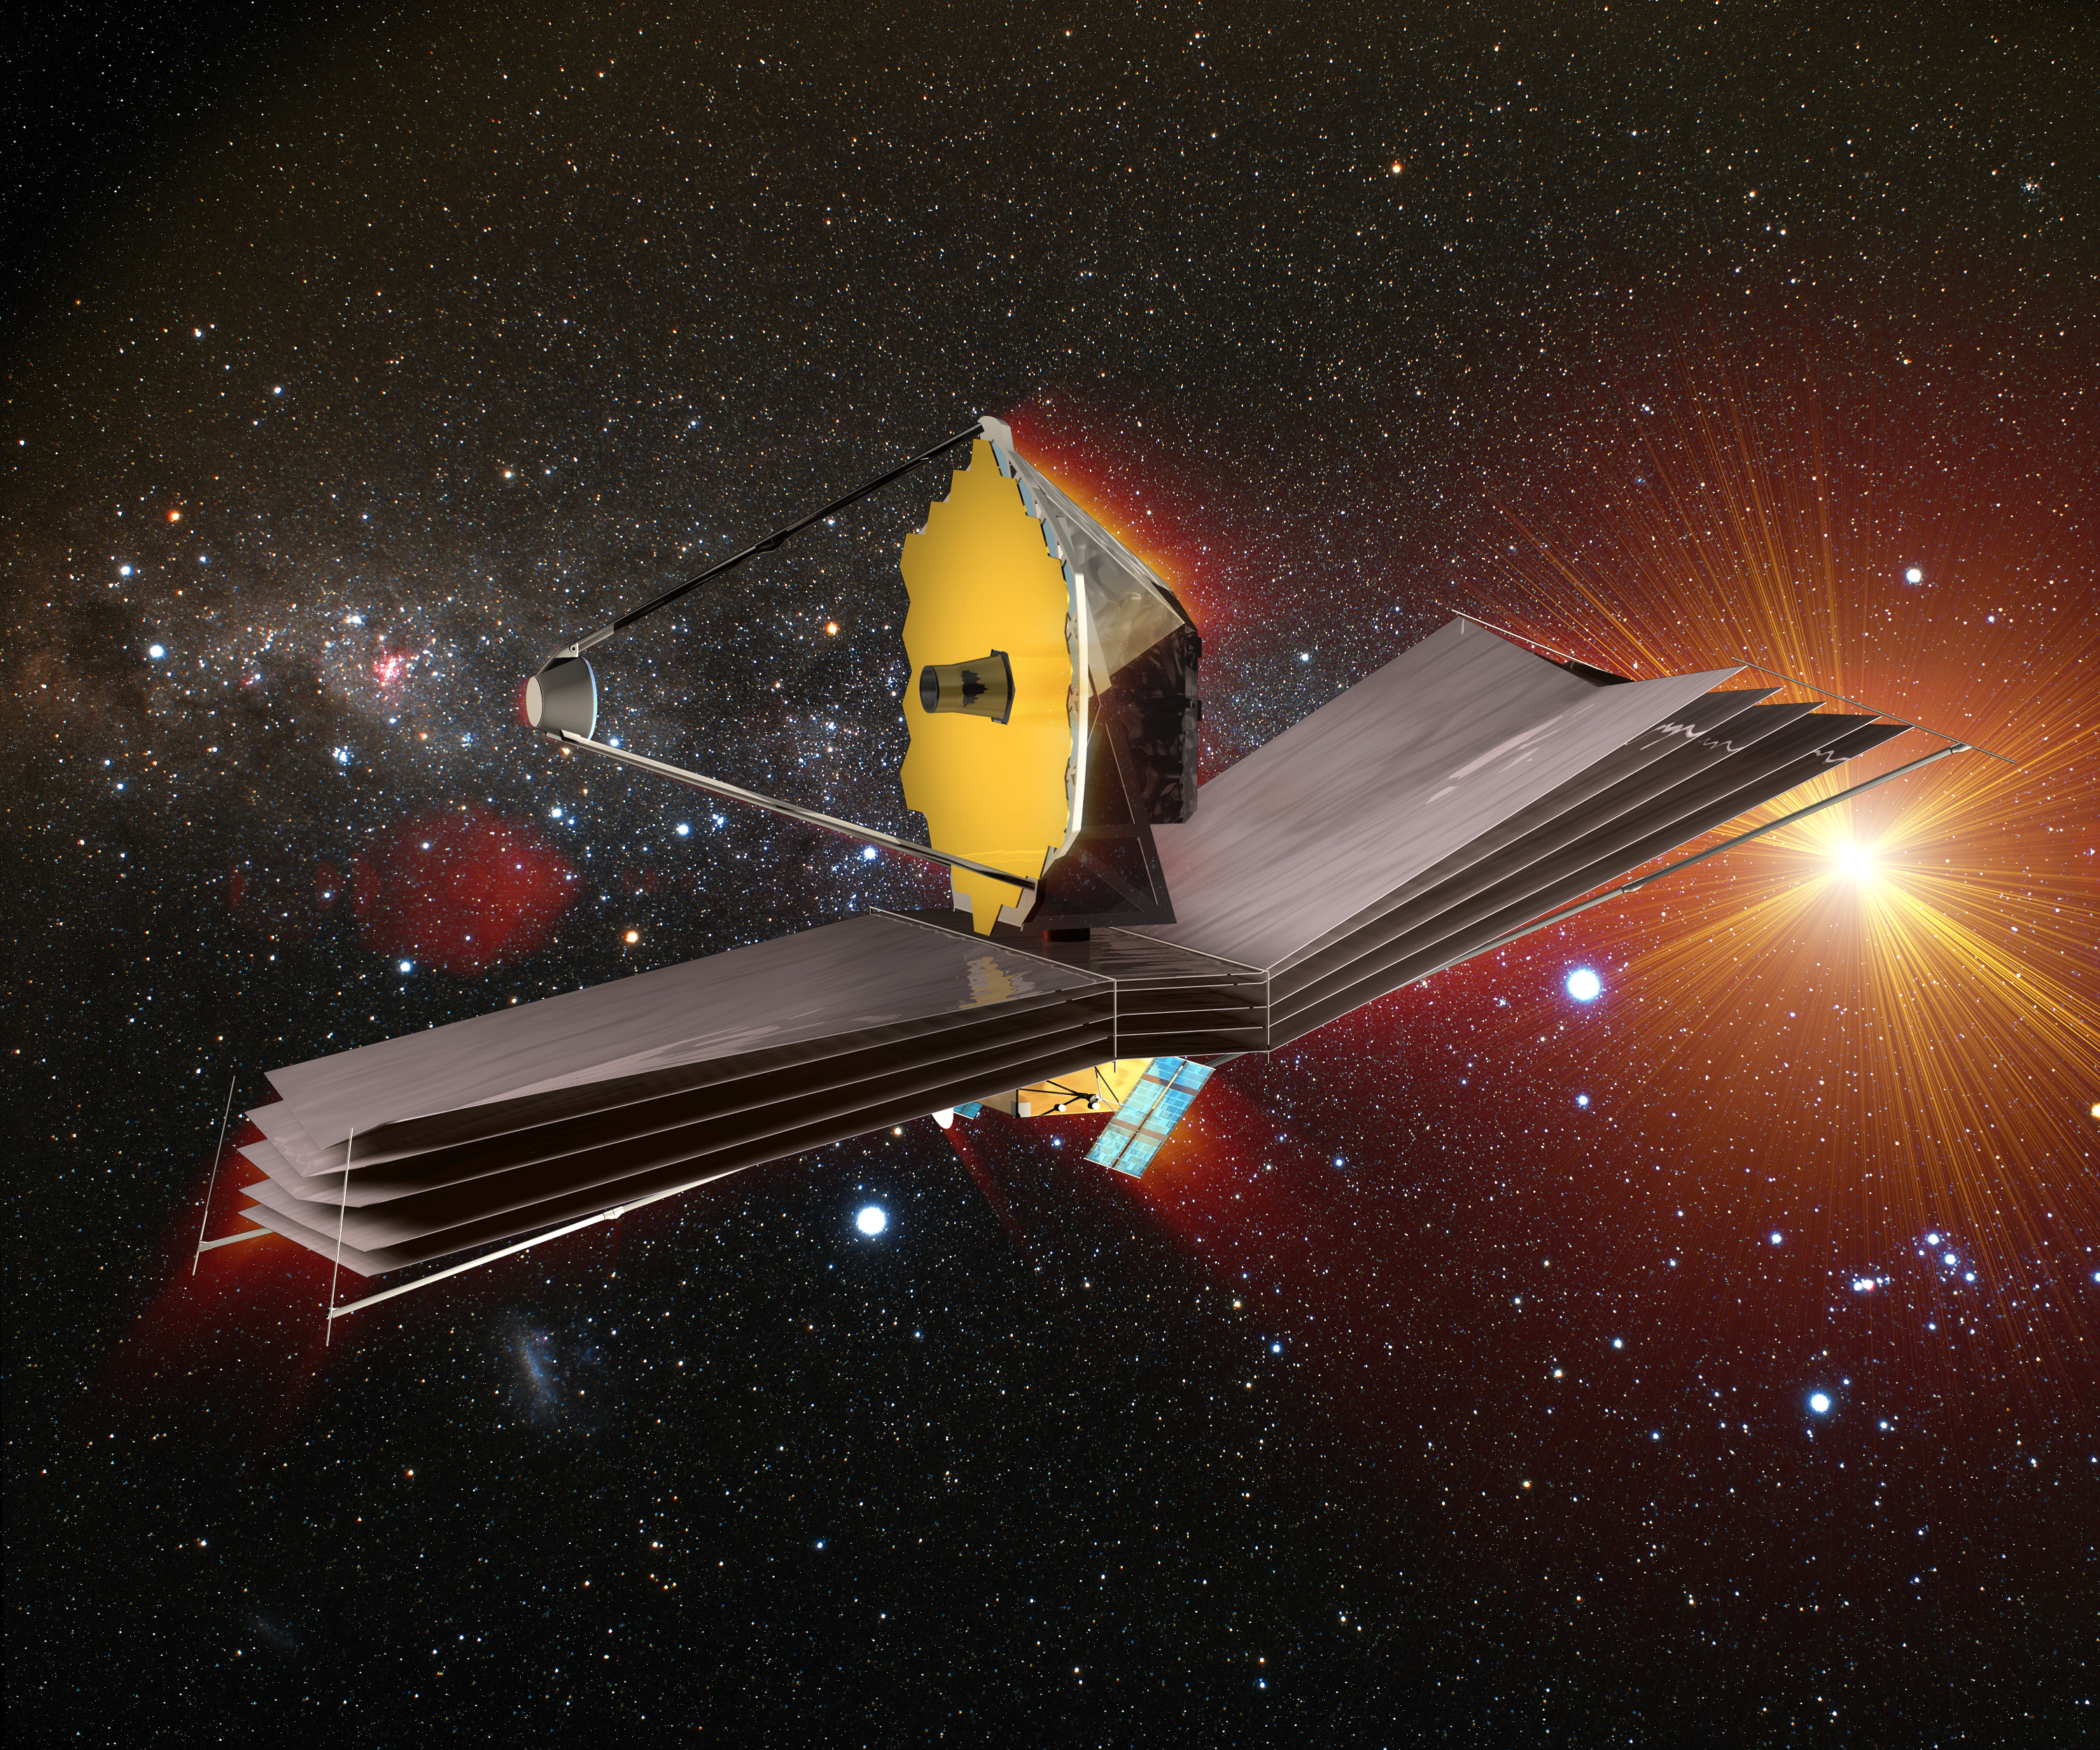

Closing in on distant, infant galaxies (artist's impression)

James Webb Space Telescope (JWST) is to many astronomers the space observatory of the next decade.

Credit: ESA